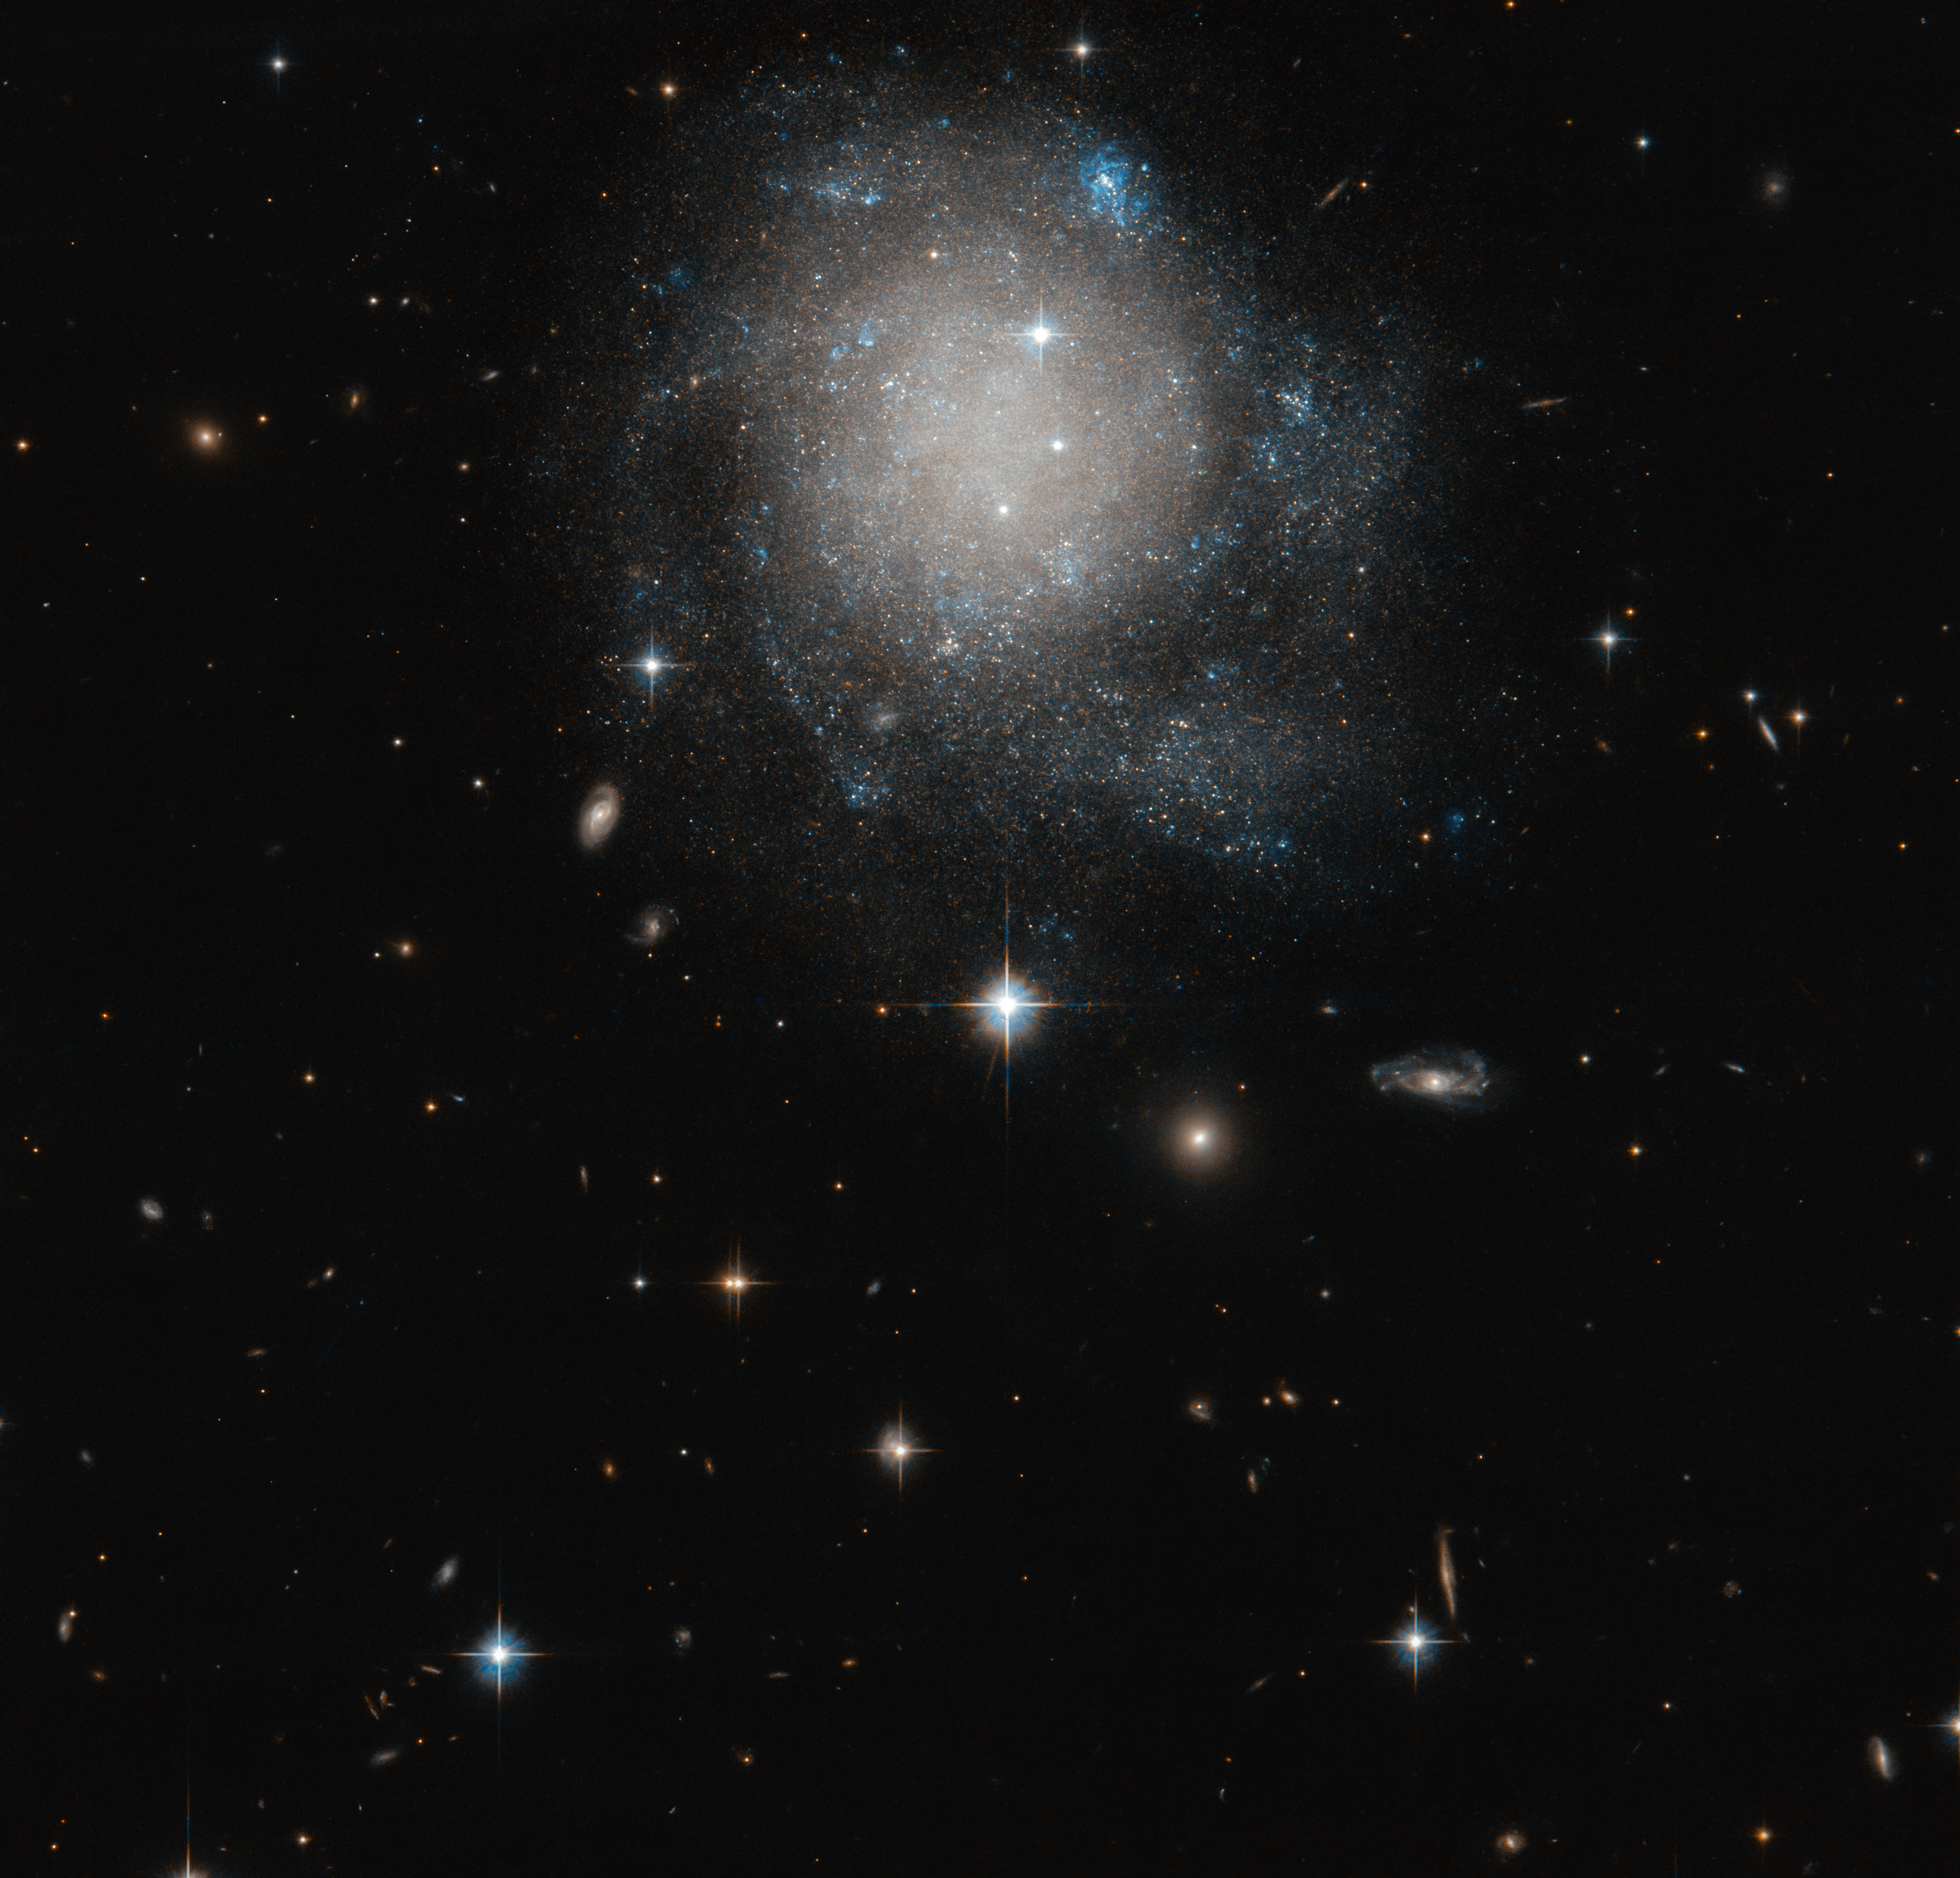

Cosmic Cinnamon Bun

Observed with the NASA/ESA Hubble Space Telescope, the faint galaxy featured in this image is known as UGC 12588. Unlike many spiral galaxies, UGC 12588 displays neither a bar of stars across its centre nor the classic prominent spiral arm pattern. Instead, to a viewer, its circular, white and mostly unstructured centre makes this galaxy more reminiscent of a cinnamon bun than a mega-structure of stars and gas in space.

Lying in the constellation of Andromeda in the Northern hemisphere, this galaxy is classified as a spiral galaxy. Unlike the classic image of a spiral galaxy, however, the huge arms of stars and gas in UGC 12588 are very faint, undistinguished, and tightly wound around its centre. The clearest view of the spiral arms comes from the bluer stars sprinkled around the edges of the galaxy that highlight the regions where new star formation is most likely taking place.

Credit: ESA/Hubble & NASA, R. Tully
Acknowledgement: Gagandeep Anand